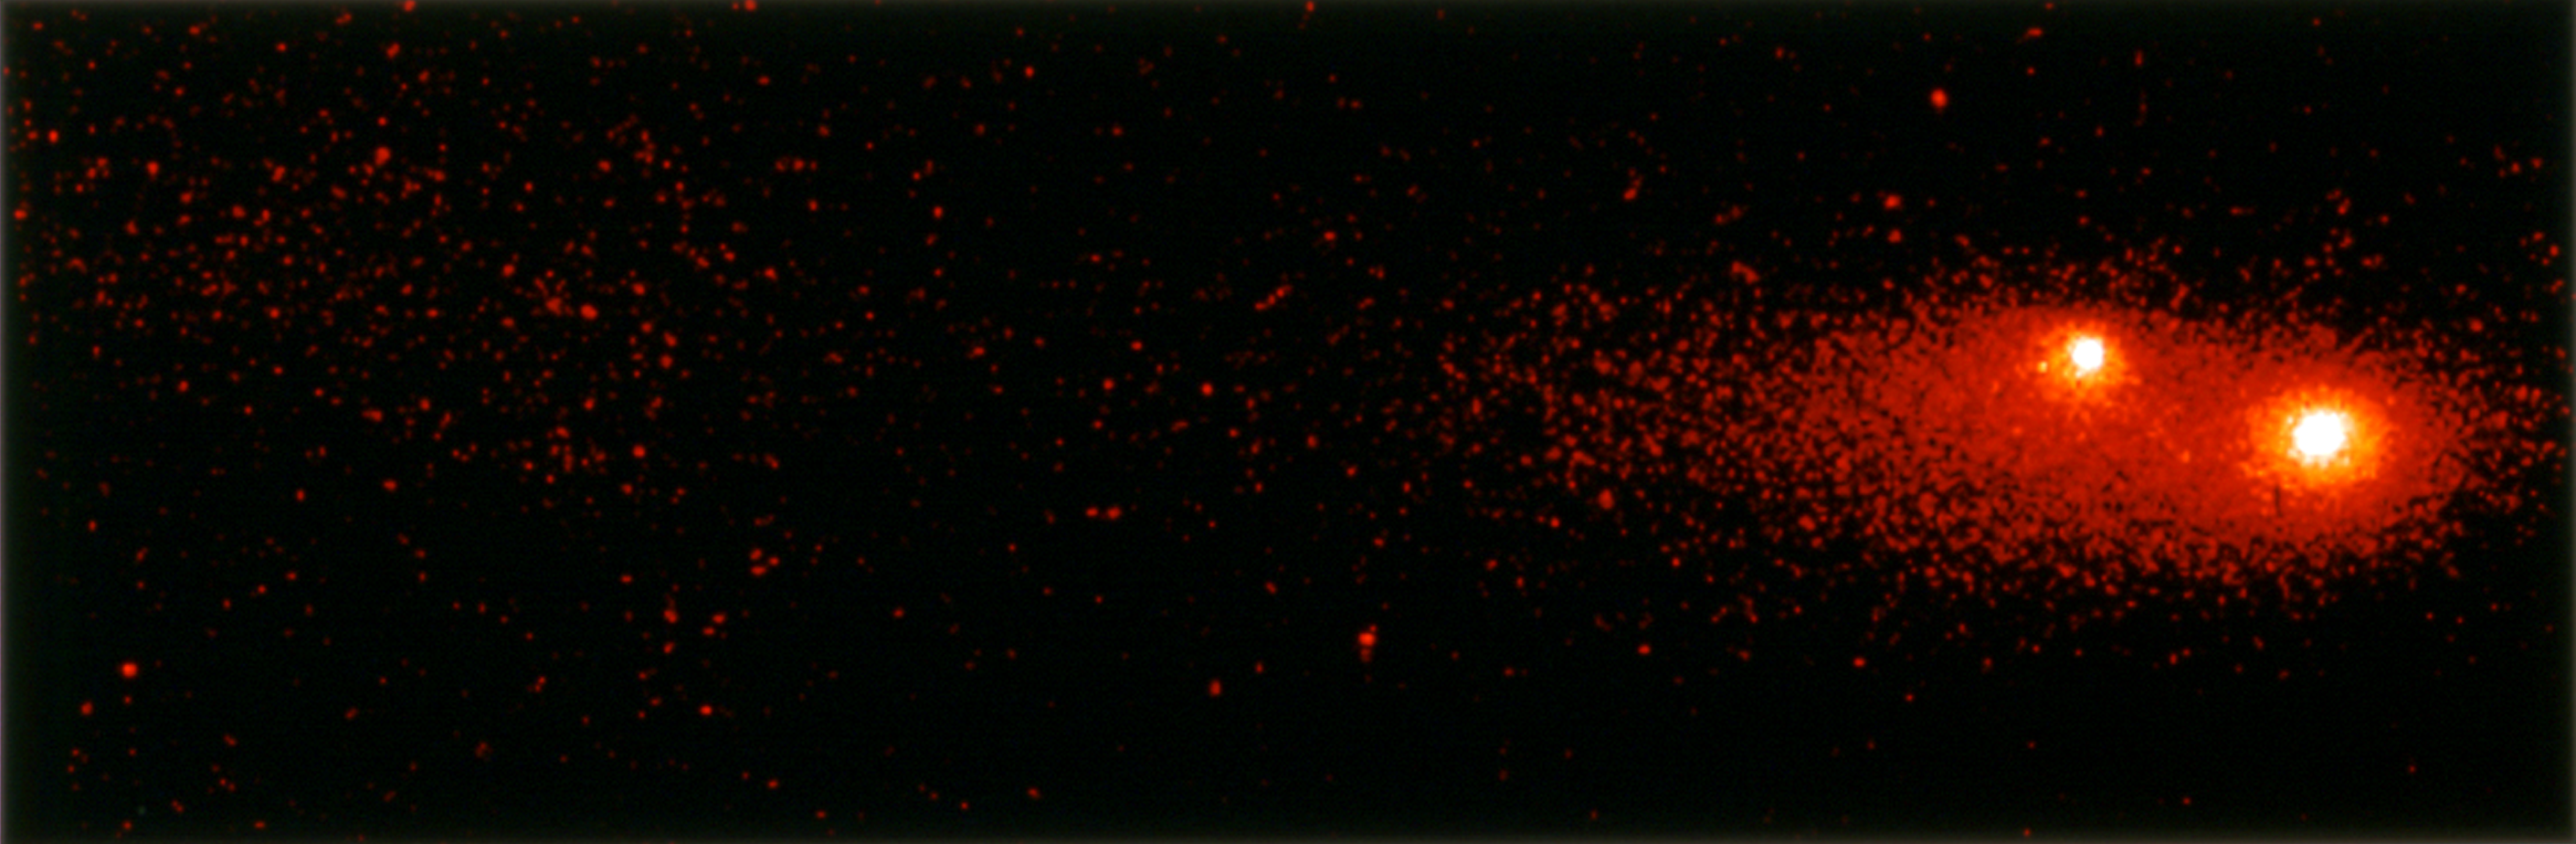

Comet P/Shoemaker-Levy 9

This image shows the "gang of four' region of Comet P/Shoemaker-Levy 9 roughly 12 months before its impact with Jupiter.

Credit: NASA & ESA